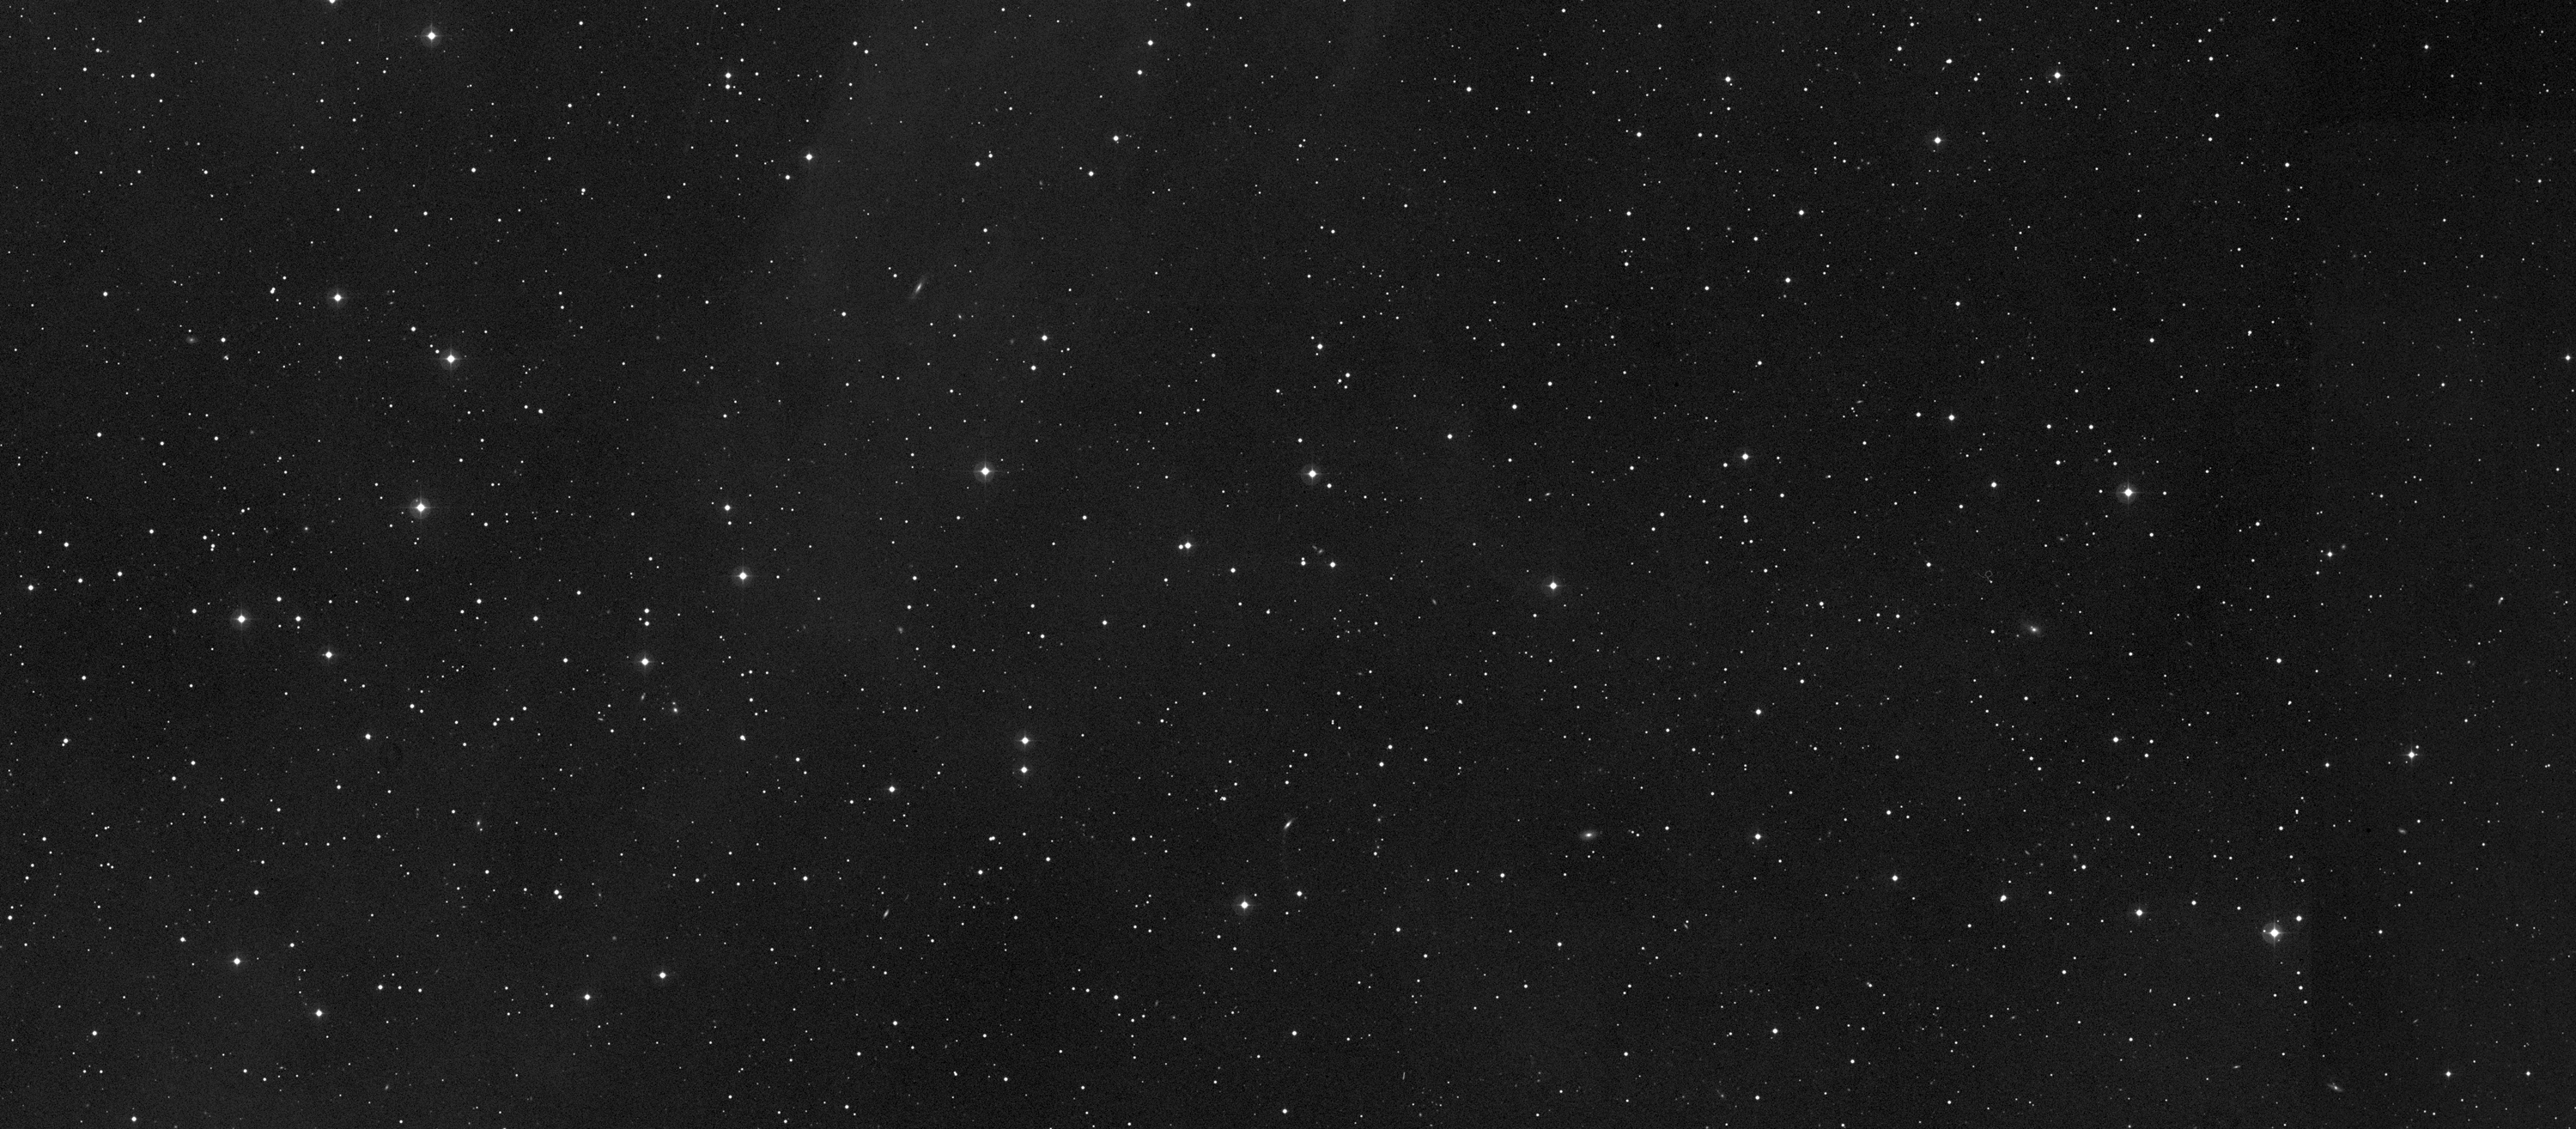

Sedna mystery deepens as Hubble offers best look at farthest planetoid

The region of sky where Sedna is moving from 2003 to 2005.

Credit: NASA, ESA and M. Brown (Caltech)